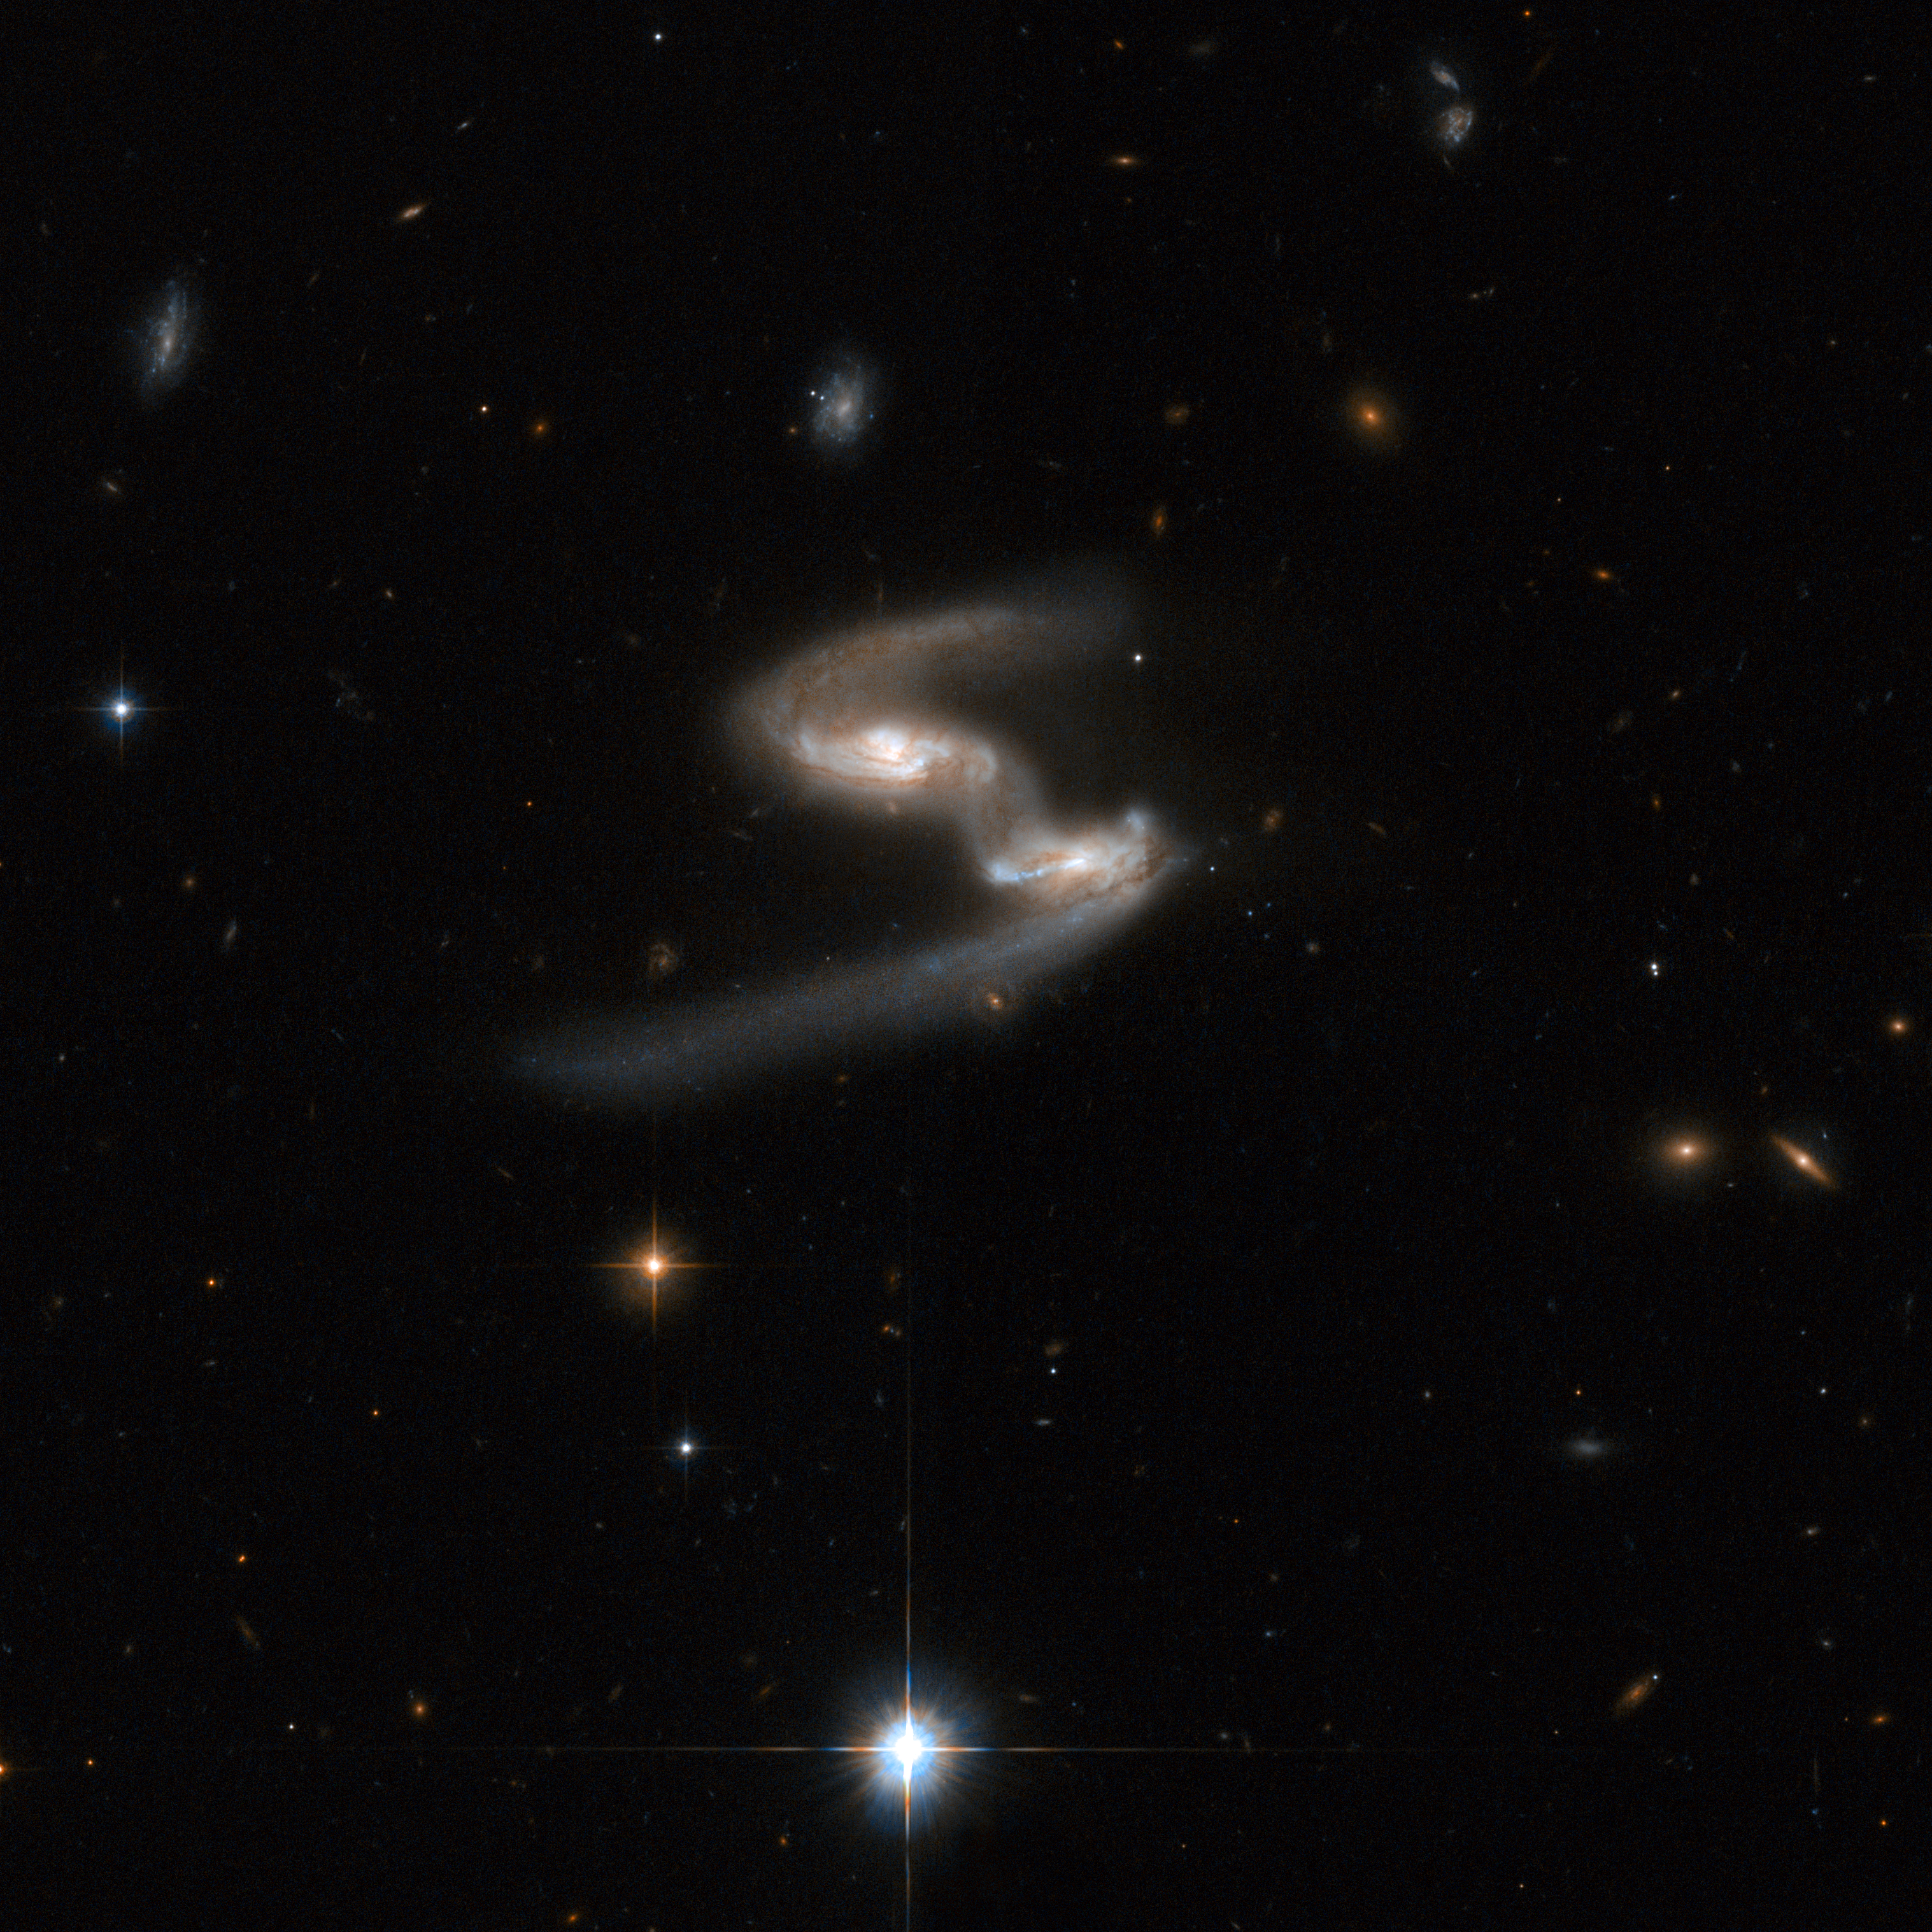

ESO 77-14

This Hubble image of ESO 77-14 is a stunning snapshot of a celestial dance performed by a pair of similar-sized galaxies. Two clear signatures of the gravitational tug of war between the galaxies are the bridge of material that connects them and the disruption of their main bodies. The galaxy on the right has a long, bluish arm while its companion has a shorter, redder arm. This interacting pair is in the constellation of Indus, the Indian, some 550 million light-years away from Earth. The dust lanes between the two galaxy centres show the extent of the distortion to the originally flat discs that have been pulled into three-dimensional shapes.

This image is part of a large collection of 59 images of merging galaxies taken by the Hubble Space Telescope and released on the occasion of its 18th anniversary on 24th April 2008.

Credit: NASA, ESA, the Hubble Heritage Team (STScI/AURA)-ESA/Hubble Collaboration and A. Evans (University of Virginia, Charlottesville/NRAO/Stony Brook University)